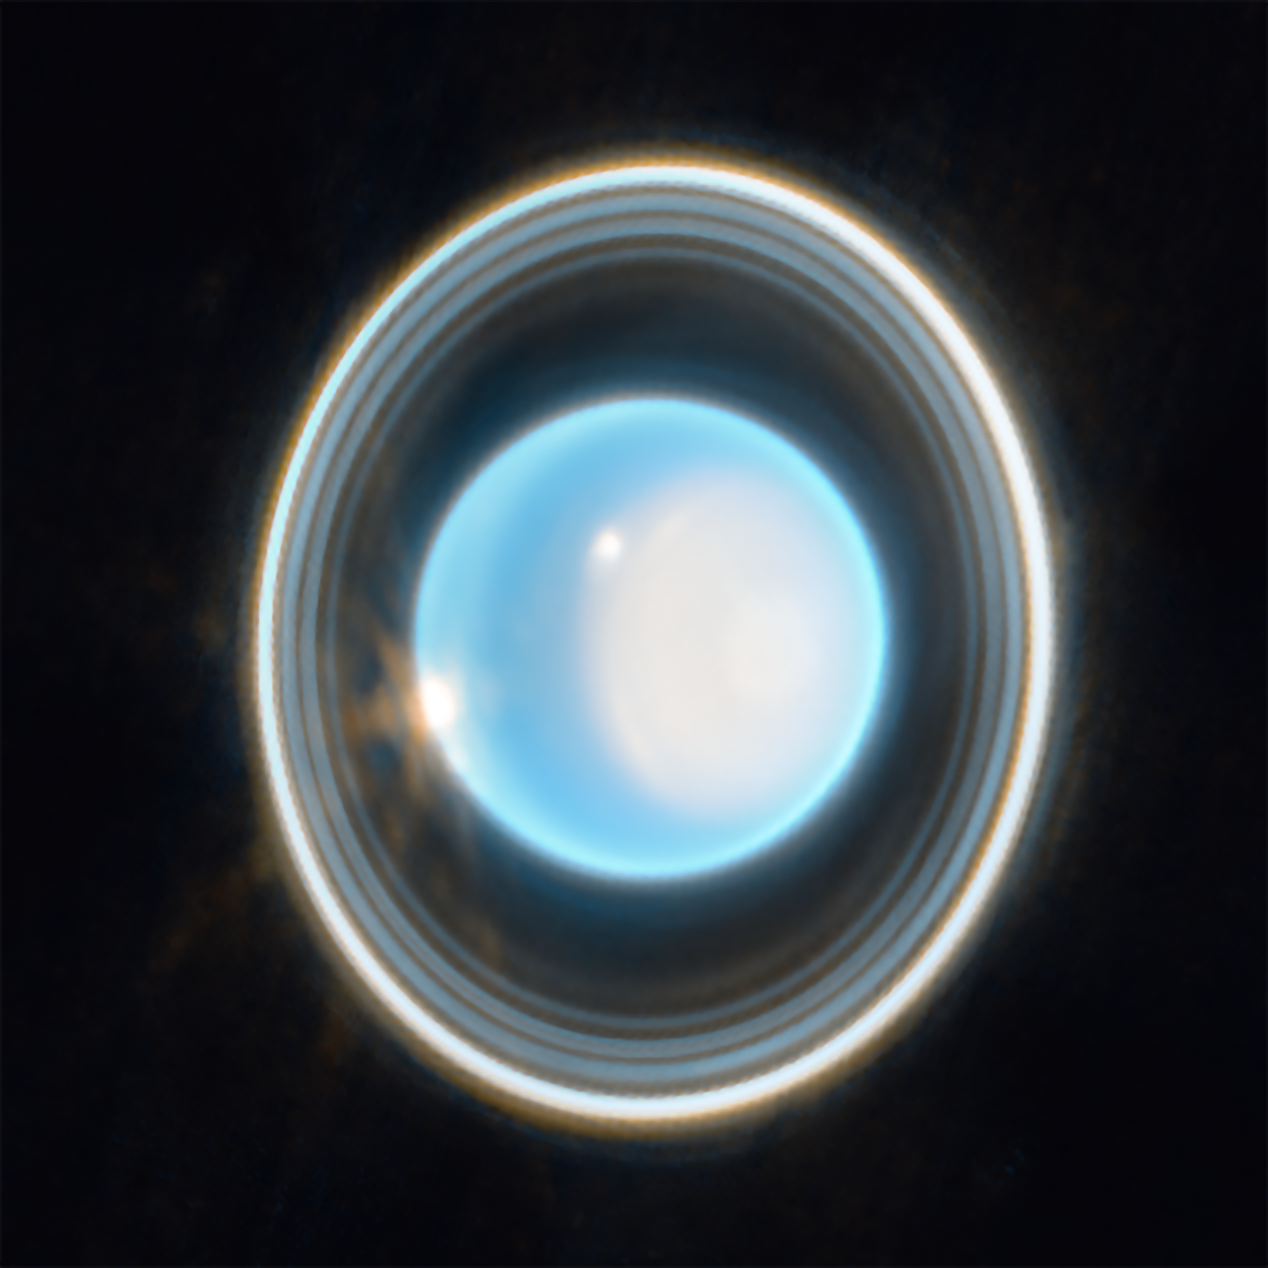

Zoomed-in image of Uranus

This zoomed-in image of Uranus, captured by Webb’s Near-Infrared Camera (NIRCam) on 6 February 2023, reveals stunning views of the planet’s rings. The planet displays a blue hue in this representative-colour image, made by combining data from two filters (F140M, F300M) at 1.4 and 3.0 microns, shown here as blue and orange, respectively.

On the right side of the planet is an area of brightening at the pole facing the Sun, known as a polar cap. This polar cap is unique to Uranus because it is the only planet in the Solar System that is tilted on its side, which causes its extreme seasons. A new aspect of the polar cap revealed by Webb is a subtle brightening near the Uranian north pole.

At the edge of the polar cap lies a bright cloud and a few fainter extended features can be seen just beyond the cap’s edge; a second very bright cloud is seen at the planet’s left limb. Such clouds are typical for Uranus at infrared wavelengths, and are likely connected to storm activity.

Credit: NASA, ESA, CSA, STScI, J. DePasquale (STScI)